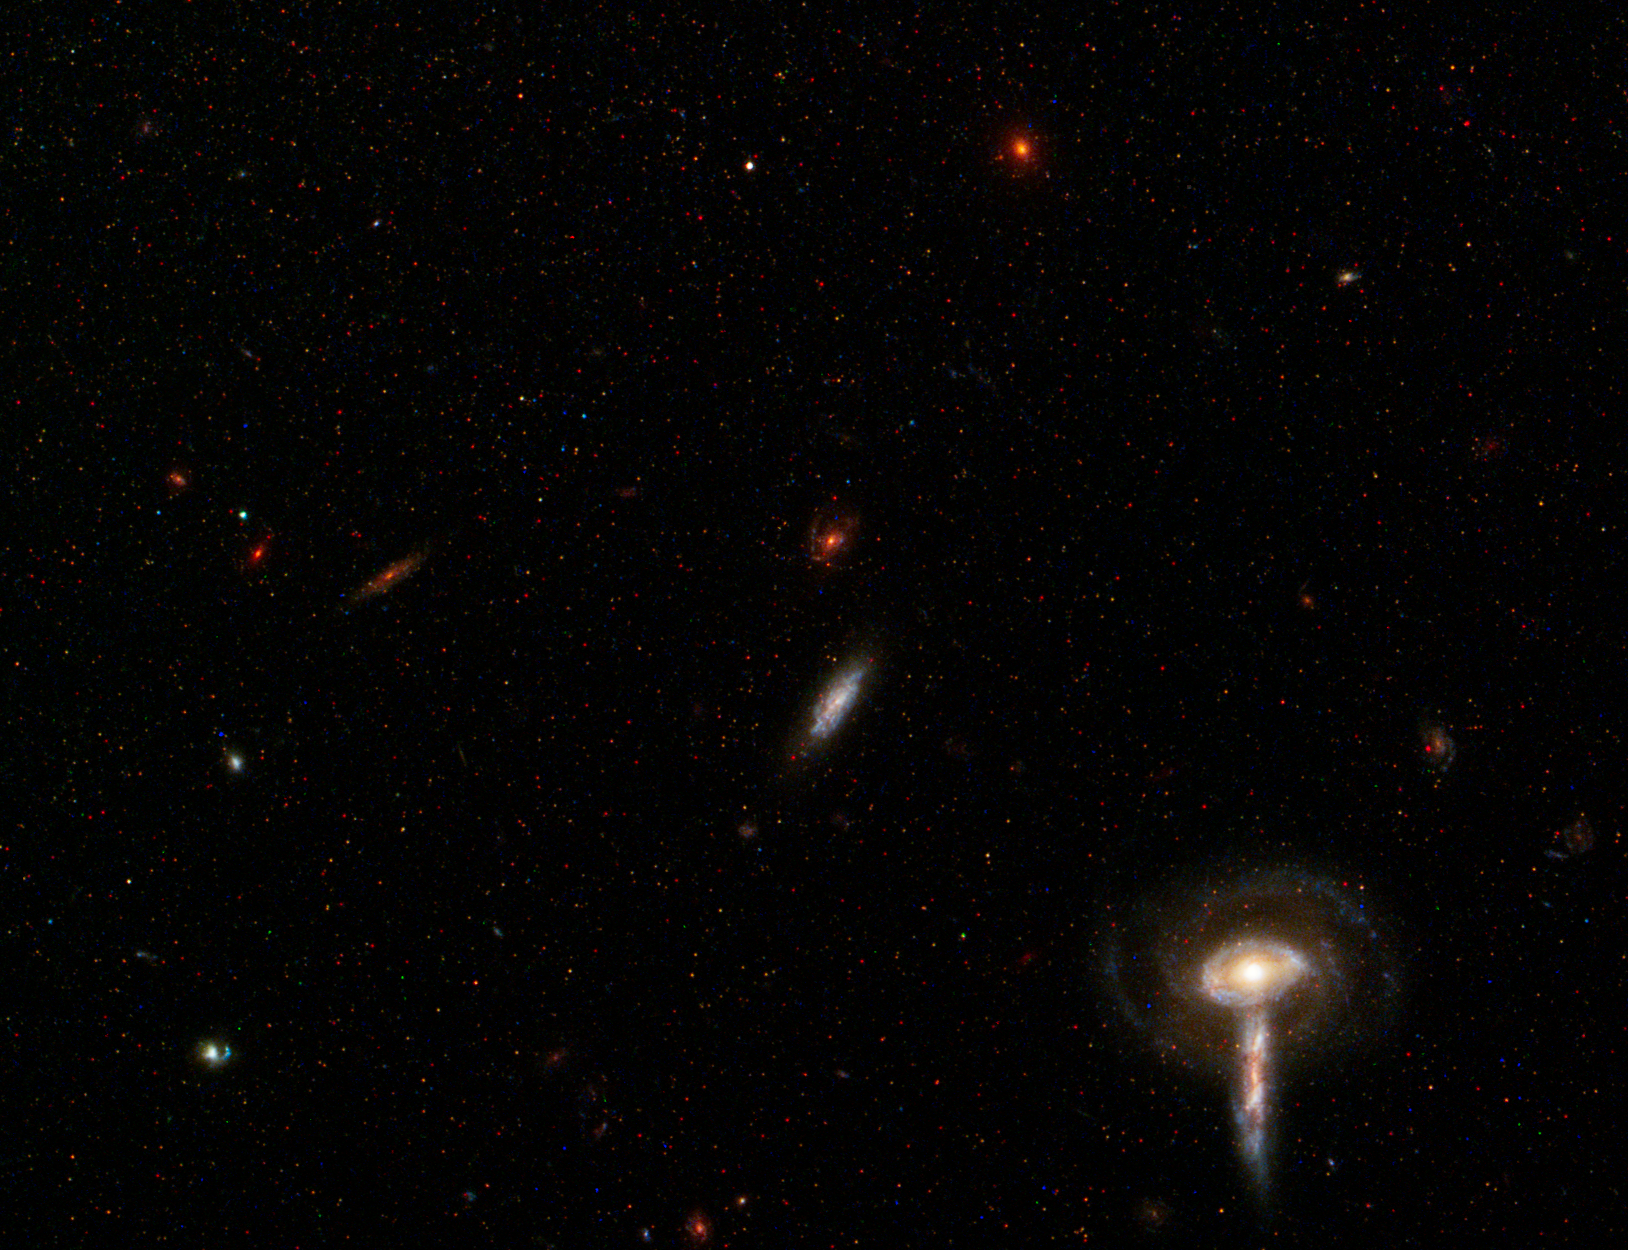

Spiral Galaxy M81 Details 7

Background group of galaxies.

Credit: NASA, ESA and the Hubble Heritage Team (STScI/AURA). Acknowledgment: A. Zezas and J. Huchra (Harvard-Smithsonian Center for Astrophysics)